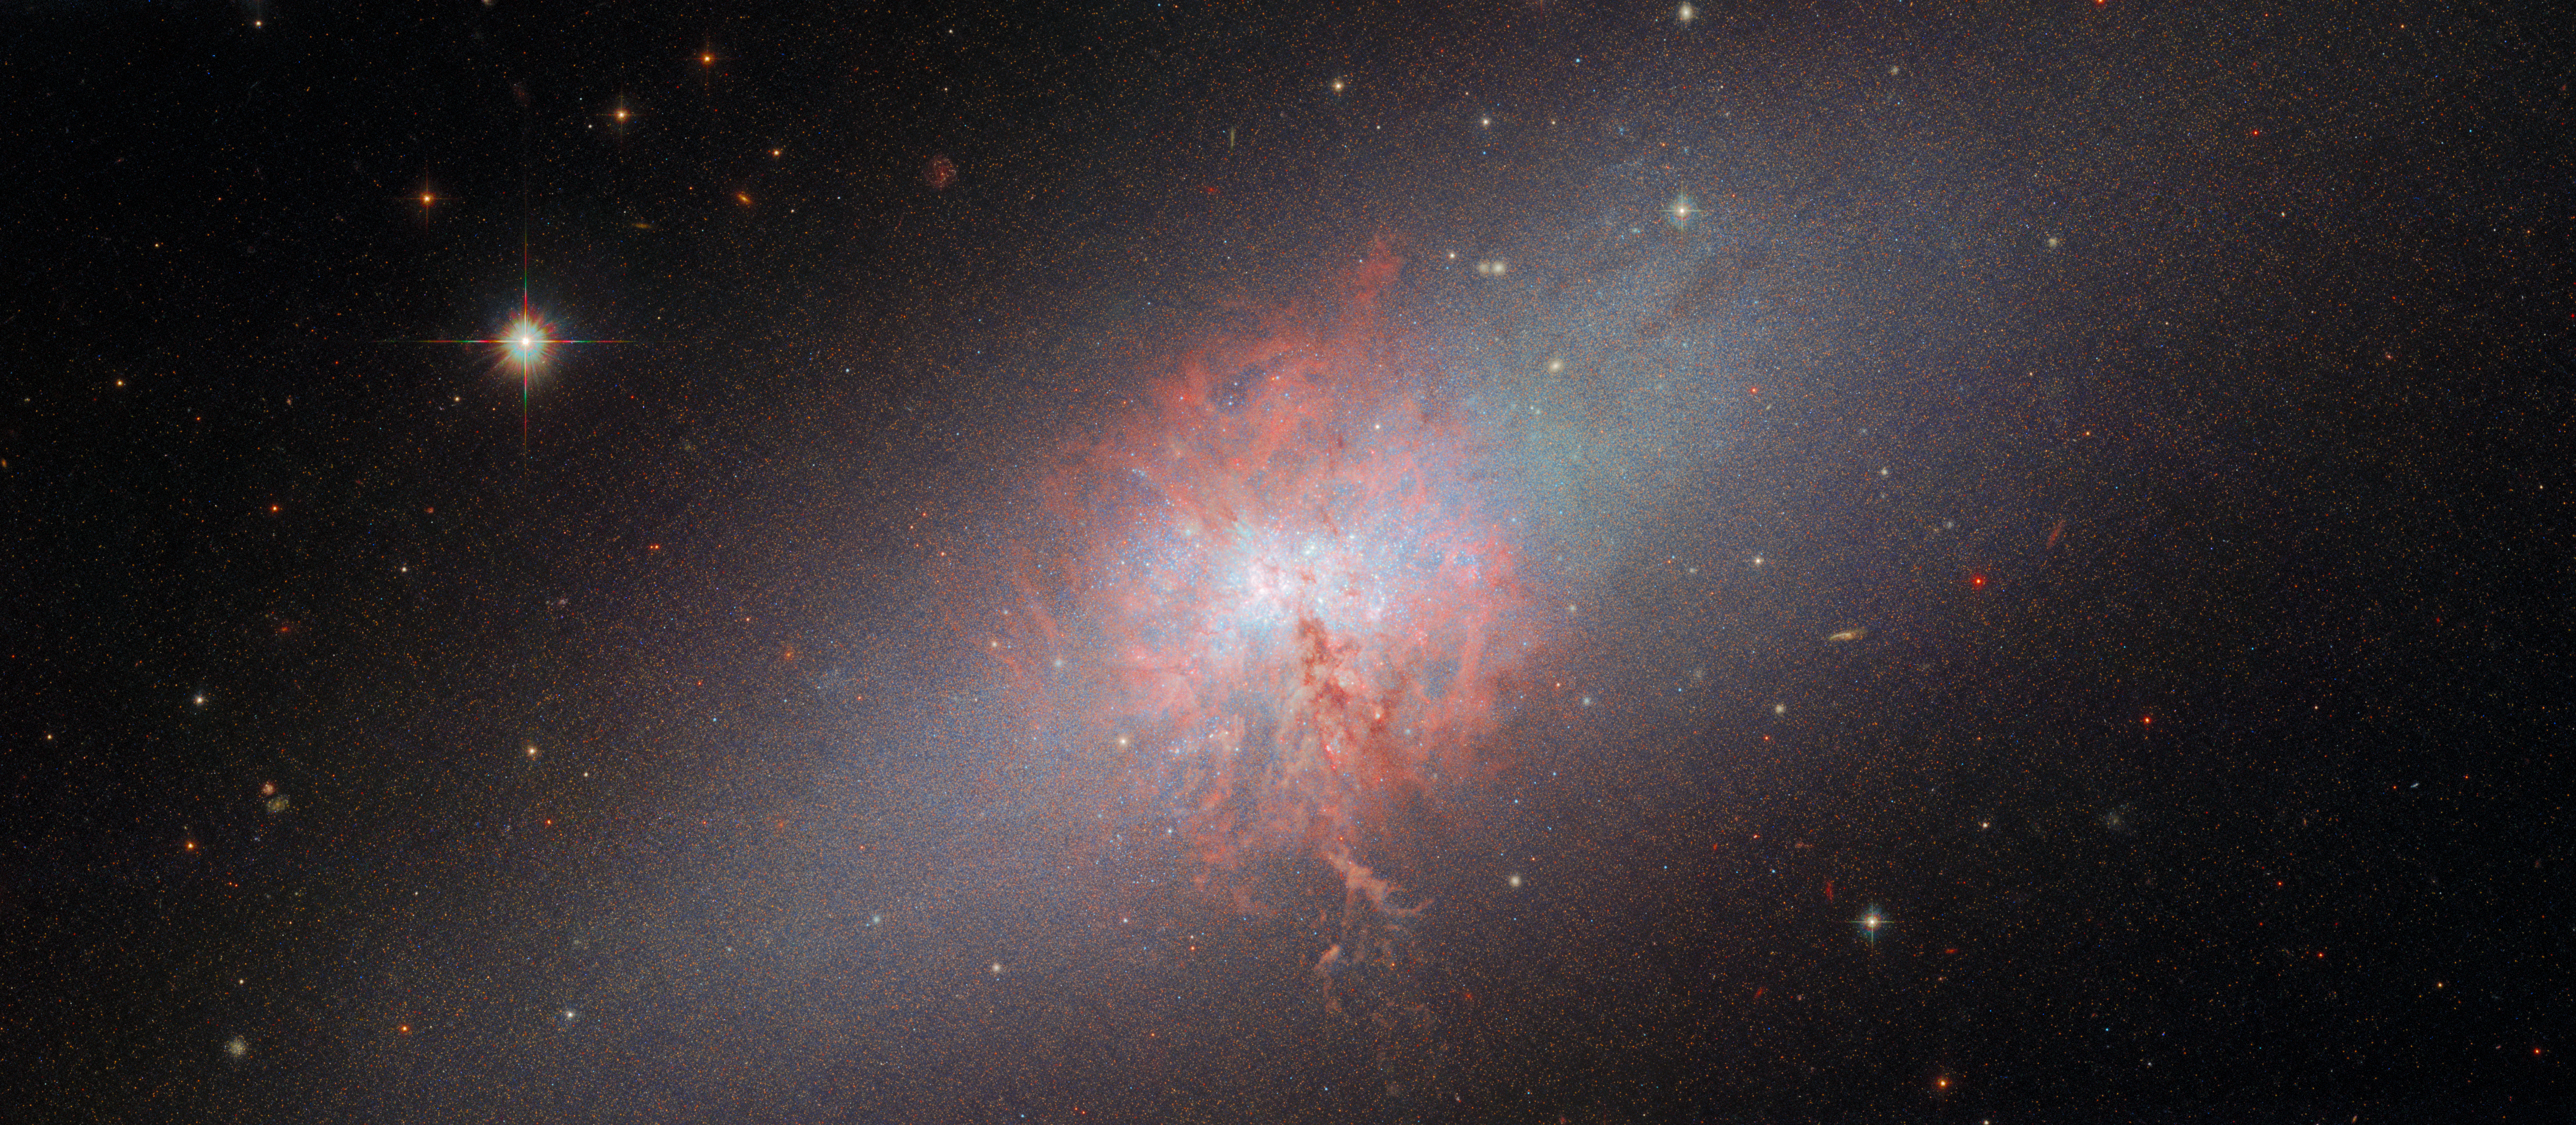

Channelling light from starbursts

The focus of this week’s Hubble Picture of the Week is the blue compact dwarf galaxy NGC 5253, located in the constellation Centaurus around 11 million light-years from Earth. This new image combines data taken with Hubble’s Advanced Camera for Surveys (ACS), using its Wide Field Channel, and with the older Wide Field and Planetary Camera 2 (WFPC2). As a bonus for this Picture of the Week, there is also a second new image made using data from the High Resolution Channel (HRC) of ACS, a sub-instrument only operational for a few years that was optimised for detailed studies of environments dense with stars.

What has interested astronomers so much about this galaxy that three of Hubble’s instruments were used to study it in depth over ten years? It turns out to lie at the focus of a few areas of research where Hubble’s capabilities are essential. Dwarf galaxies are considered important for understanding the evolution of both stars and galaxies through time, since they resemble ancient, distant galaxies. NGC 5253 is called both a 'starburst galaxy' and a 'blue compact dwarf': these names mean it is forming clusters of bright, massive stars at an exceptional rate. This Hubble image clearly shows the dense nebula which is being consumed to birth these stars, and which makes NGC 5253 a laboratory in which to investigate stellar composition, star formation and star clusters, all at once.

A tremendously high rate of star formation is a recipe for star clusters, but NGC 5253 goes beyond that: in a small region of the core, the star formation is so intense that the galaxy contains no fewer than three 'super star clusters' (SSCs). SSCs are very bright, populous and massive open clusters which are believed to evolve into globular clusters. Globular clusters themselves offer unique insights into how stars form and evolve, but their origins are poorly understood. Astronomers were therefore eager to make use of the HRC sub-instrument, with its superb resolution, to home in on these small, very dense clusters of stars.

Credit: ESA/Hubble & NASA, A. Zezas, D. Calzetti